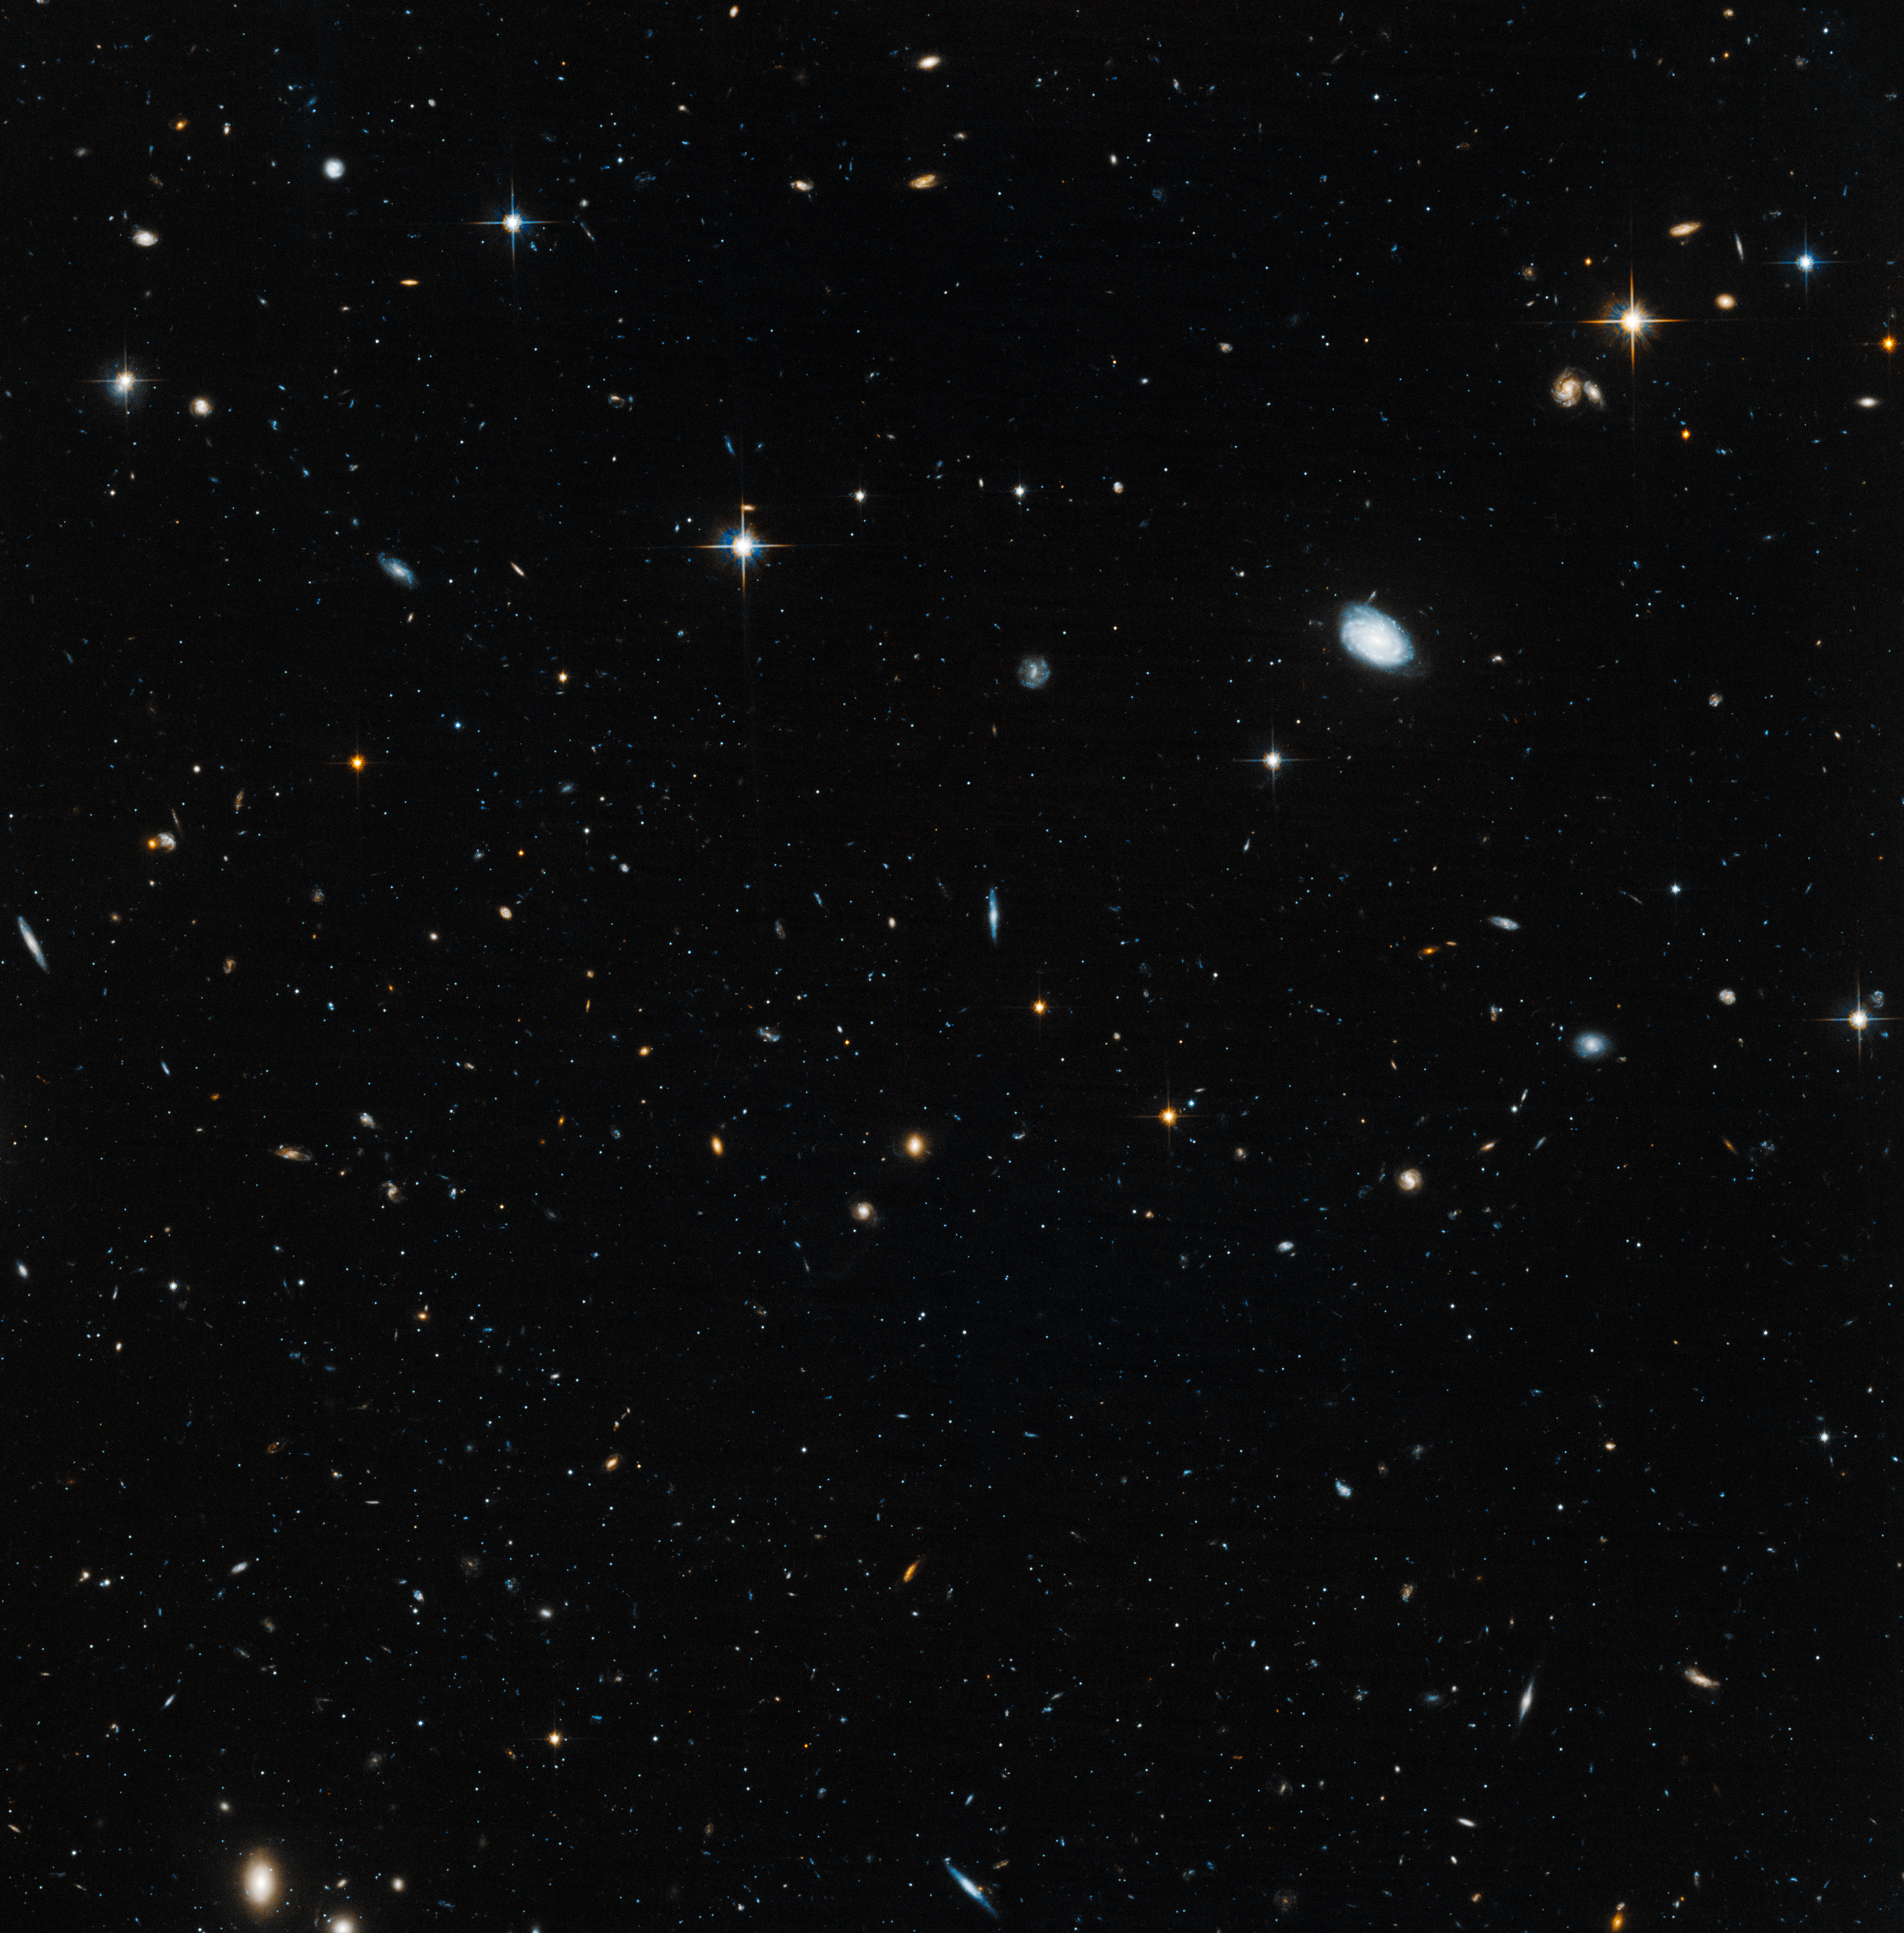

Hubble probes ‘ghost’ galaxy

Astronomers used the NASA/ESA Hubble Space Telescope to unmask the dim, star-starved dwarf galaxy Leo IV. This Hubble image demonstrates why astronomers had a tough time spotting this small-fry galaxy: it is practically invisible. The image shows how the handful of stars from the sparse galaxy are virtually indistinguishable from the background.

Residing 500 000 light-years from Earth, Leo IV is one of more than a dozen ultra-faint dwarf galaxies found lurking around our Milky Way galaxy. These galaxies are dominated by dark matter, an invisible substance that makes up the bulk of the Universe’s mass.

Credit: NASA, ESA, and T. Brown (STScI)